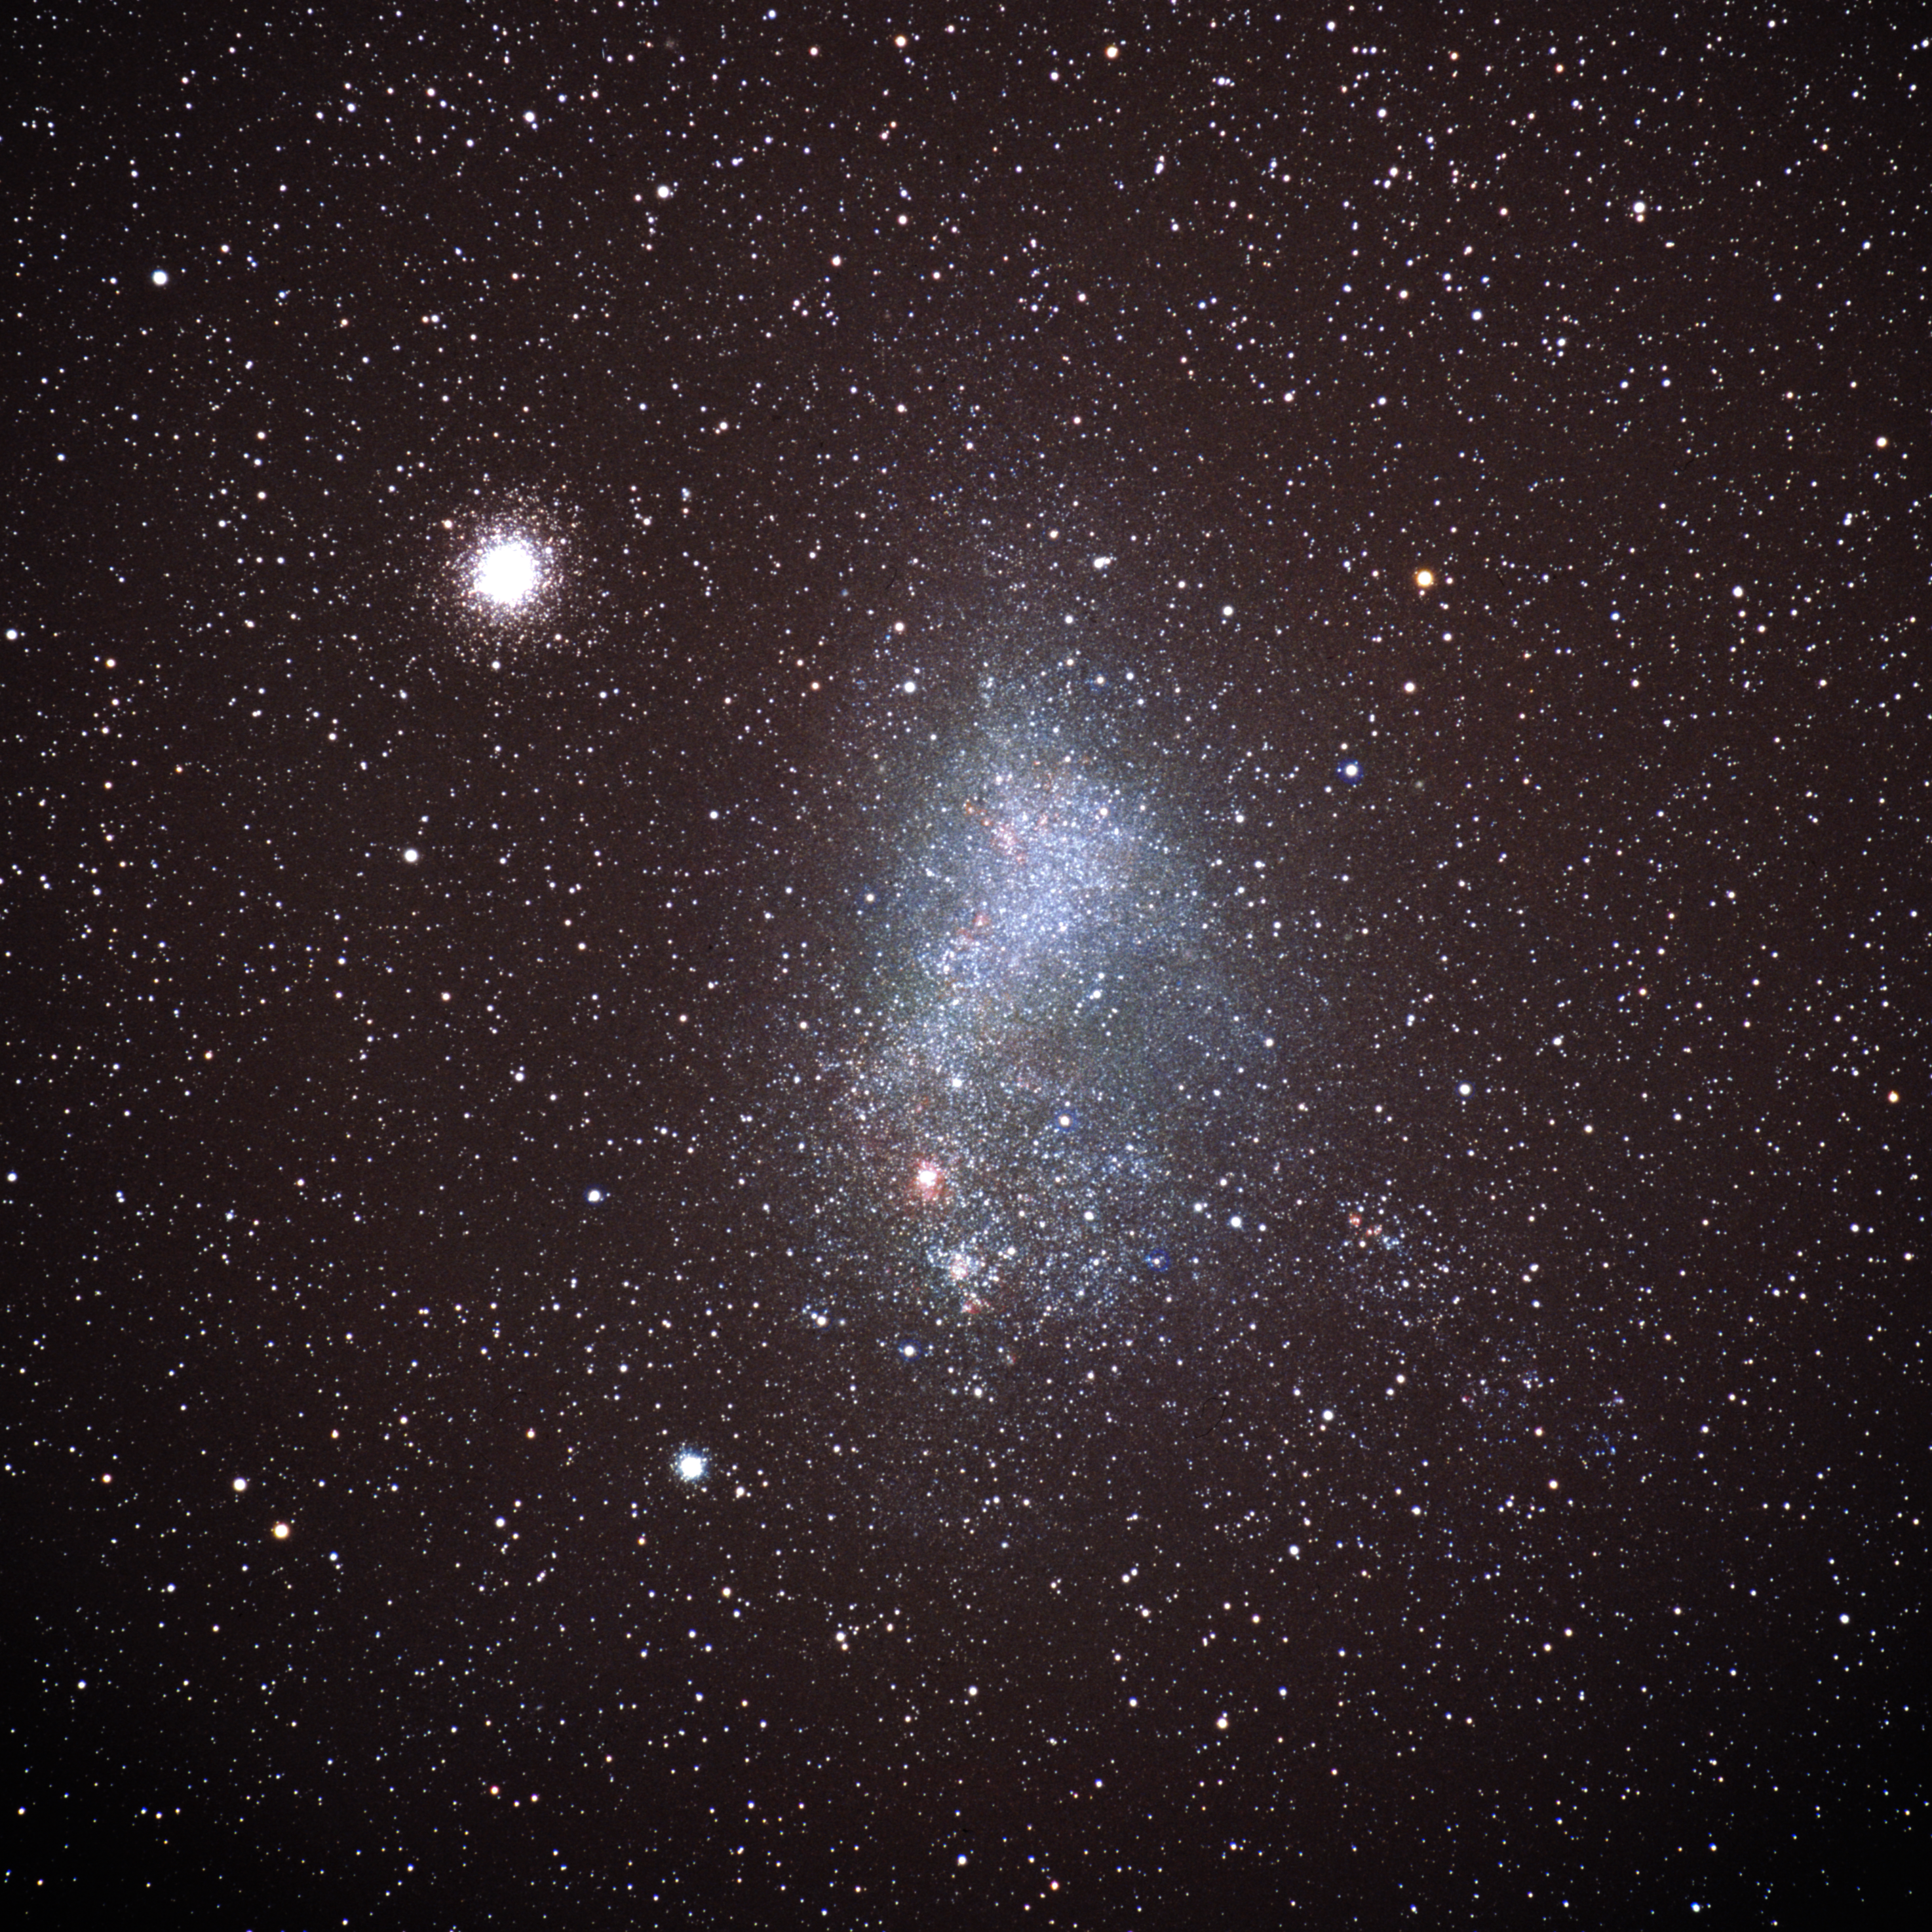

Globular cluster 47 Tucanae and the Small Magellanic Cloud (ground-based image)

This photo was taken by the Japanese astrophotographer Akira Fujii and shows a wide-angle view of the globular cluster 47 Tucanae and the Small Magellanic Cloud.

Credit: Akira Fujii